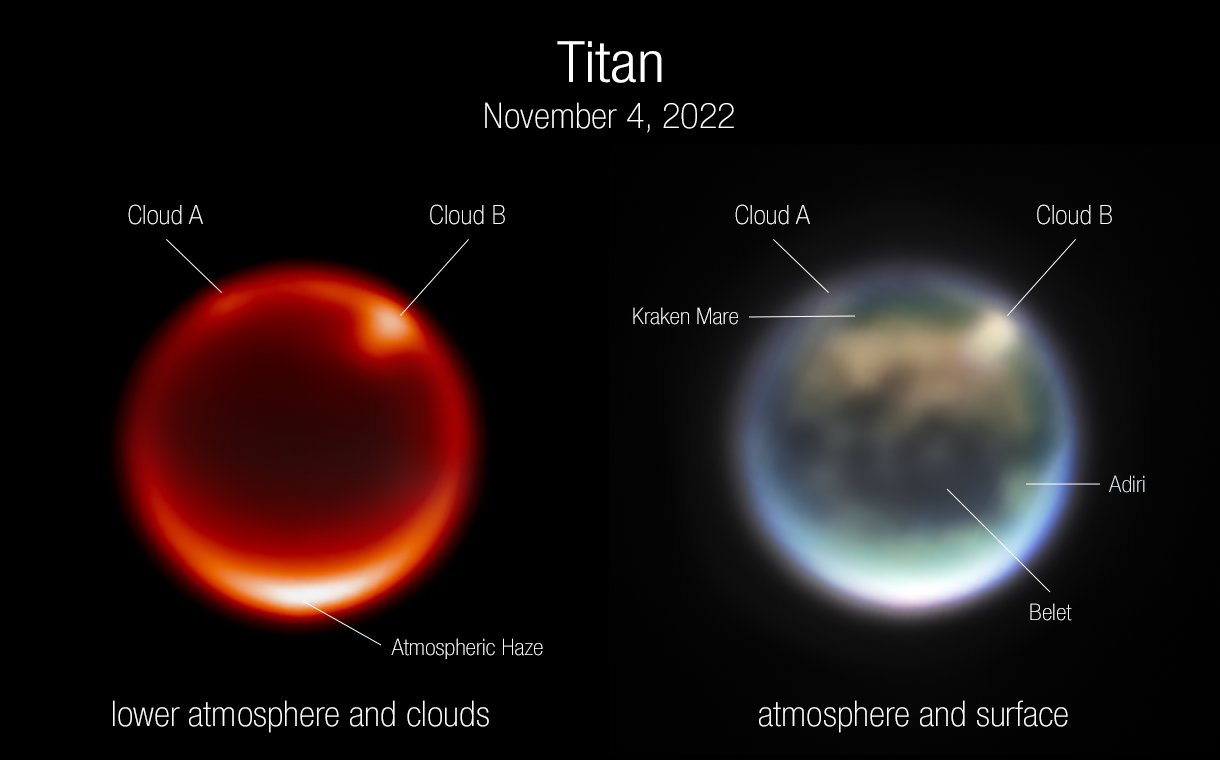

Webb Tracks Clouds on Saturn’s Moon Titan (Annotated)

These are images of Saturn’s moon Titan, captured by the NASA/ESA/CSA James Webb Space Telescope’s NIRCam instrument on 4 November 2022. The image on the left uses a filter sensitive to Titan’s lower atmosphere. The bright spots are prominent clouds in the northern hemisphere. The image on the right is a color composite image. Several prominent surface features are labeled: Kraken Mare is thought to be a methane sea; Belet is composed of dark-colored sand dunes; Adiri is a bright albedo feature.

Titan is the only moon in the Solar System with a dense atmosphere, and it is also the only planetary body other than Earth that currently has rivers, lakes, and seas. Unlike Earth, however, the liquid on Titan’s surface is composed of hydrocarbons including methane and ethane, not water. Its atmosphere is filled with thick haze that obscures visible light reflecting off the surface.

Scientists have waited for years to use Webb’s infrared vision to study Titan’s atmosphere, including its fascinating weather patterns and gaseous composition, and also see through the haze to study albedo features (bright and dark patches) on the surface. Further Titan data are expected from NIRCam and NIRSpec as well as the first data from Webb’s Mid-Infrared Instrument (MIRI) in May or June of 2023. The MIRI data will reveal an even greater part of Titan’s spectrum, including some wavelengths that have never before been seen. This will give scientists information about the complex gases in Titan’s atmosphere, as well as crucial clues to deciphering why Titan is the only moon in the Solar System with a dense atmosphere.

Note: This post highlights data from Webb science in progress, which has not yet been through the peer-review process.

Credit: NASA, ESA, CSA, A. Pagan (STScI), JWST Titan GTO Team